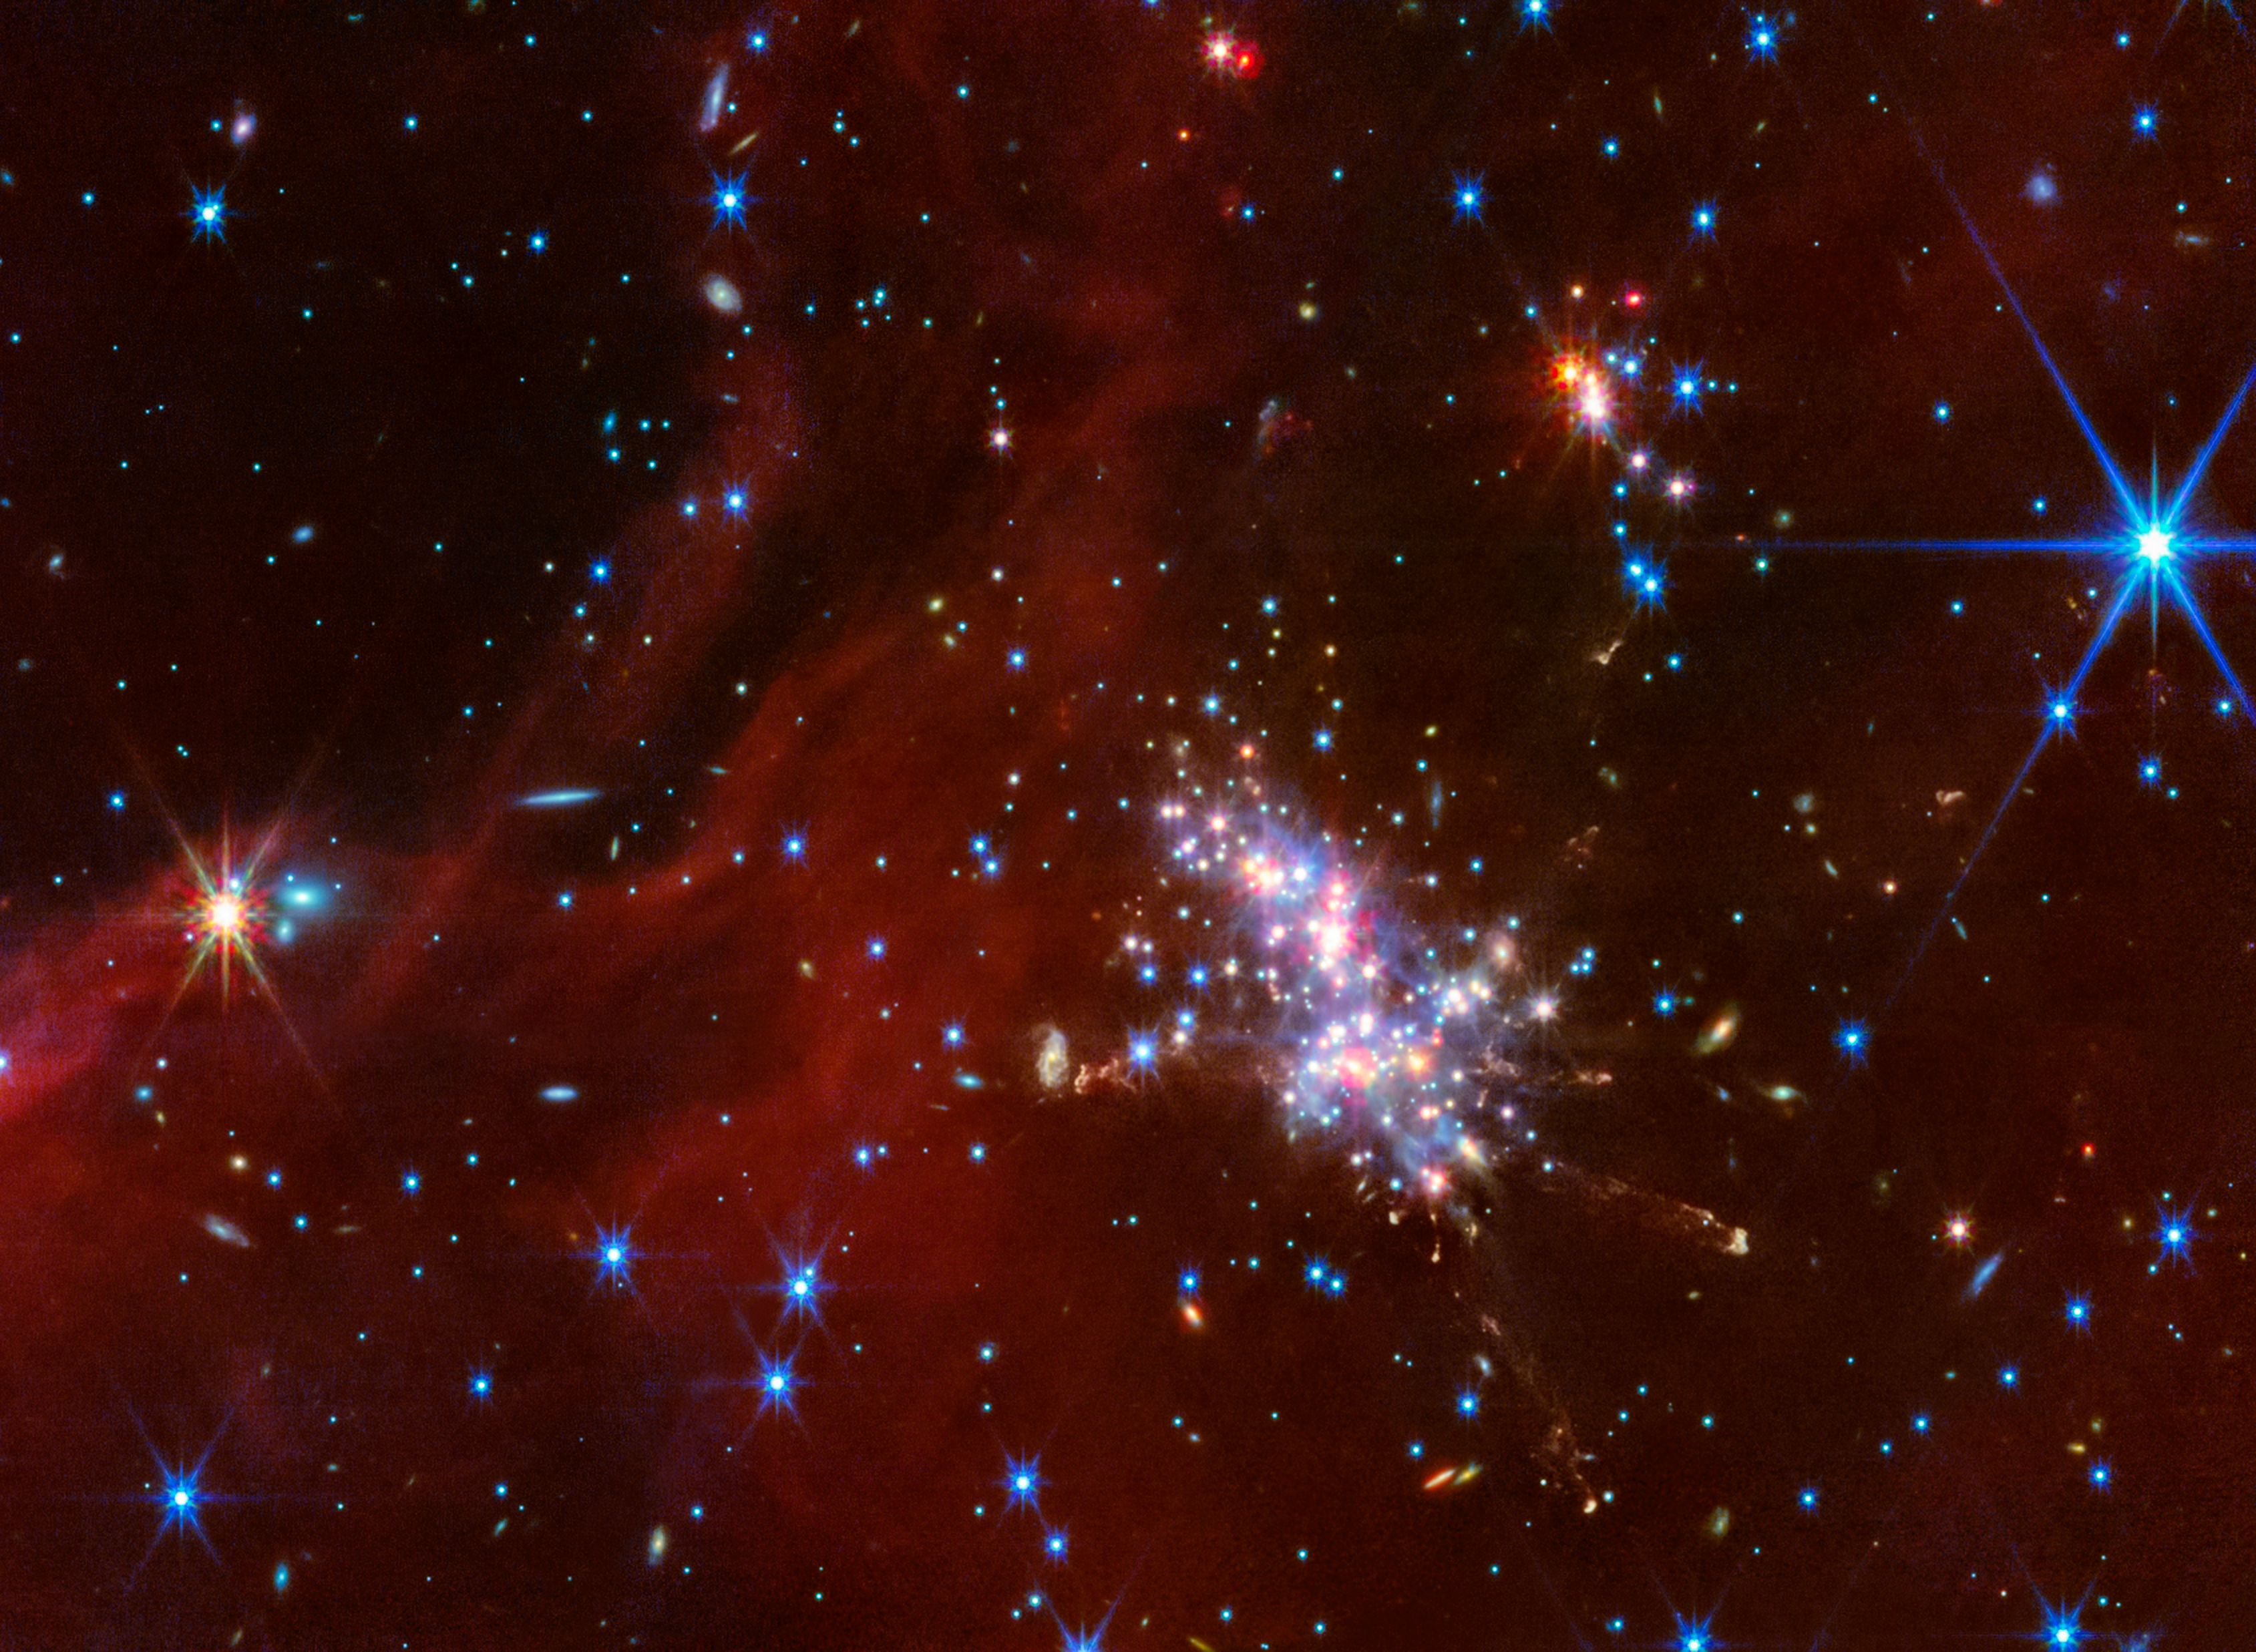

Digel Cloud 2S

The NASA/ESA/CSA James Webb Space Telescope has observed the very outskirts of our Milky Way galaxy. Known as the Extreme Outer Galaxy, this region is located more than 58 000 light-years from the Galactic centre.

To learn more about how a local environment affects the star formation process within it, a team of scientists directed the telescope’s NIRCam (Near-InfraRed Camera) and MIRI (Mid-InfraRed Instrument) towards a total of four star-forming areas within Digel Clouds 1 and 2: 1A, 1B, 2N, and 2S.

In the case of Cloud 2S, shown here, Webb revealed a luminous main cluster that contains newly formed stars. Several of these young stars are emitting extended jets of material from their poles. To the main cluster’s top right is a sub-cluster of stars, a feature that scientists previously suspected to exist but has now been confirmed with Webb. Additionally, the telescope revealed a deep sea of background galaxies and red nebulous structures that are being carved away by winds and radiation from nearby stars.

Credit: NASA, ESA, CSA, STScI, M. Ressler (NASA-JPL)